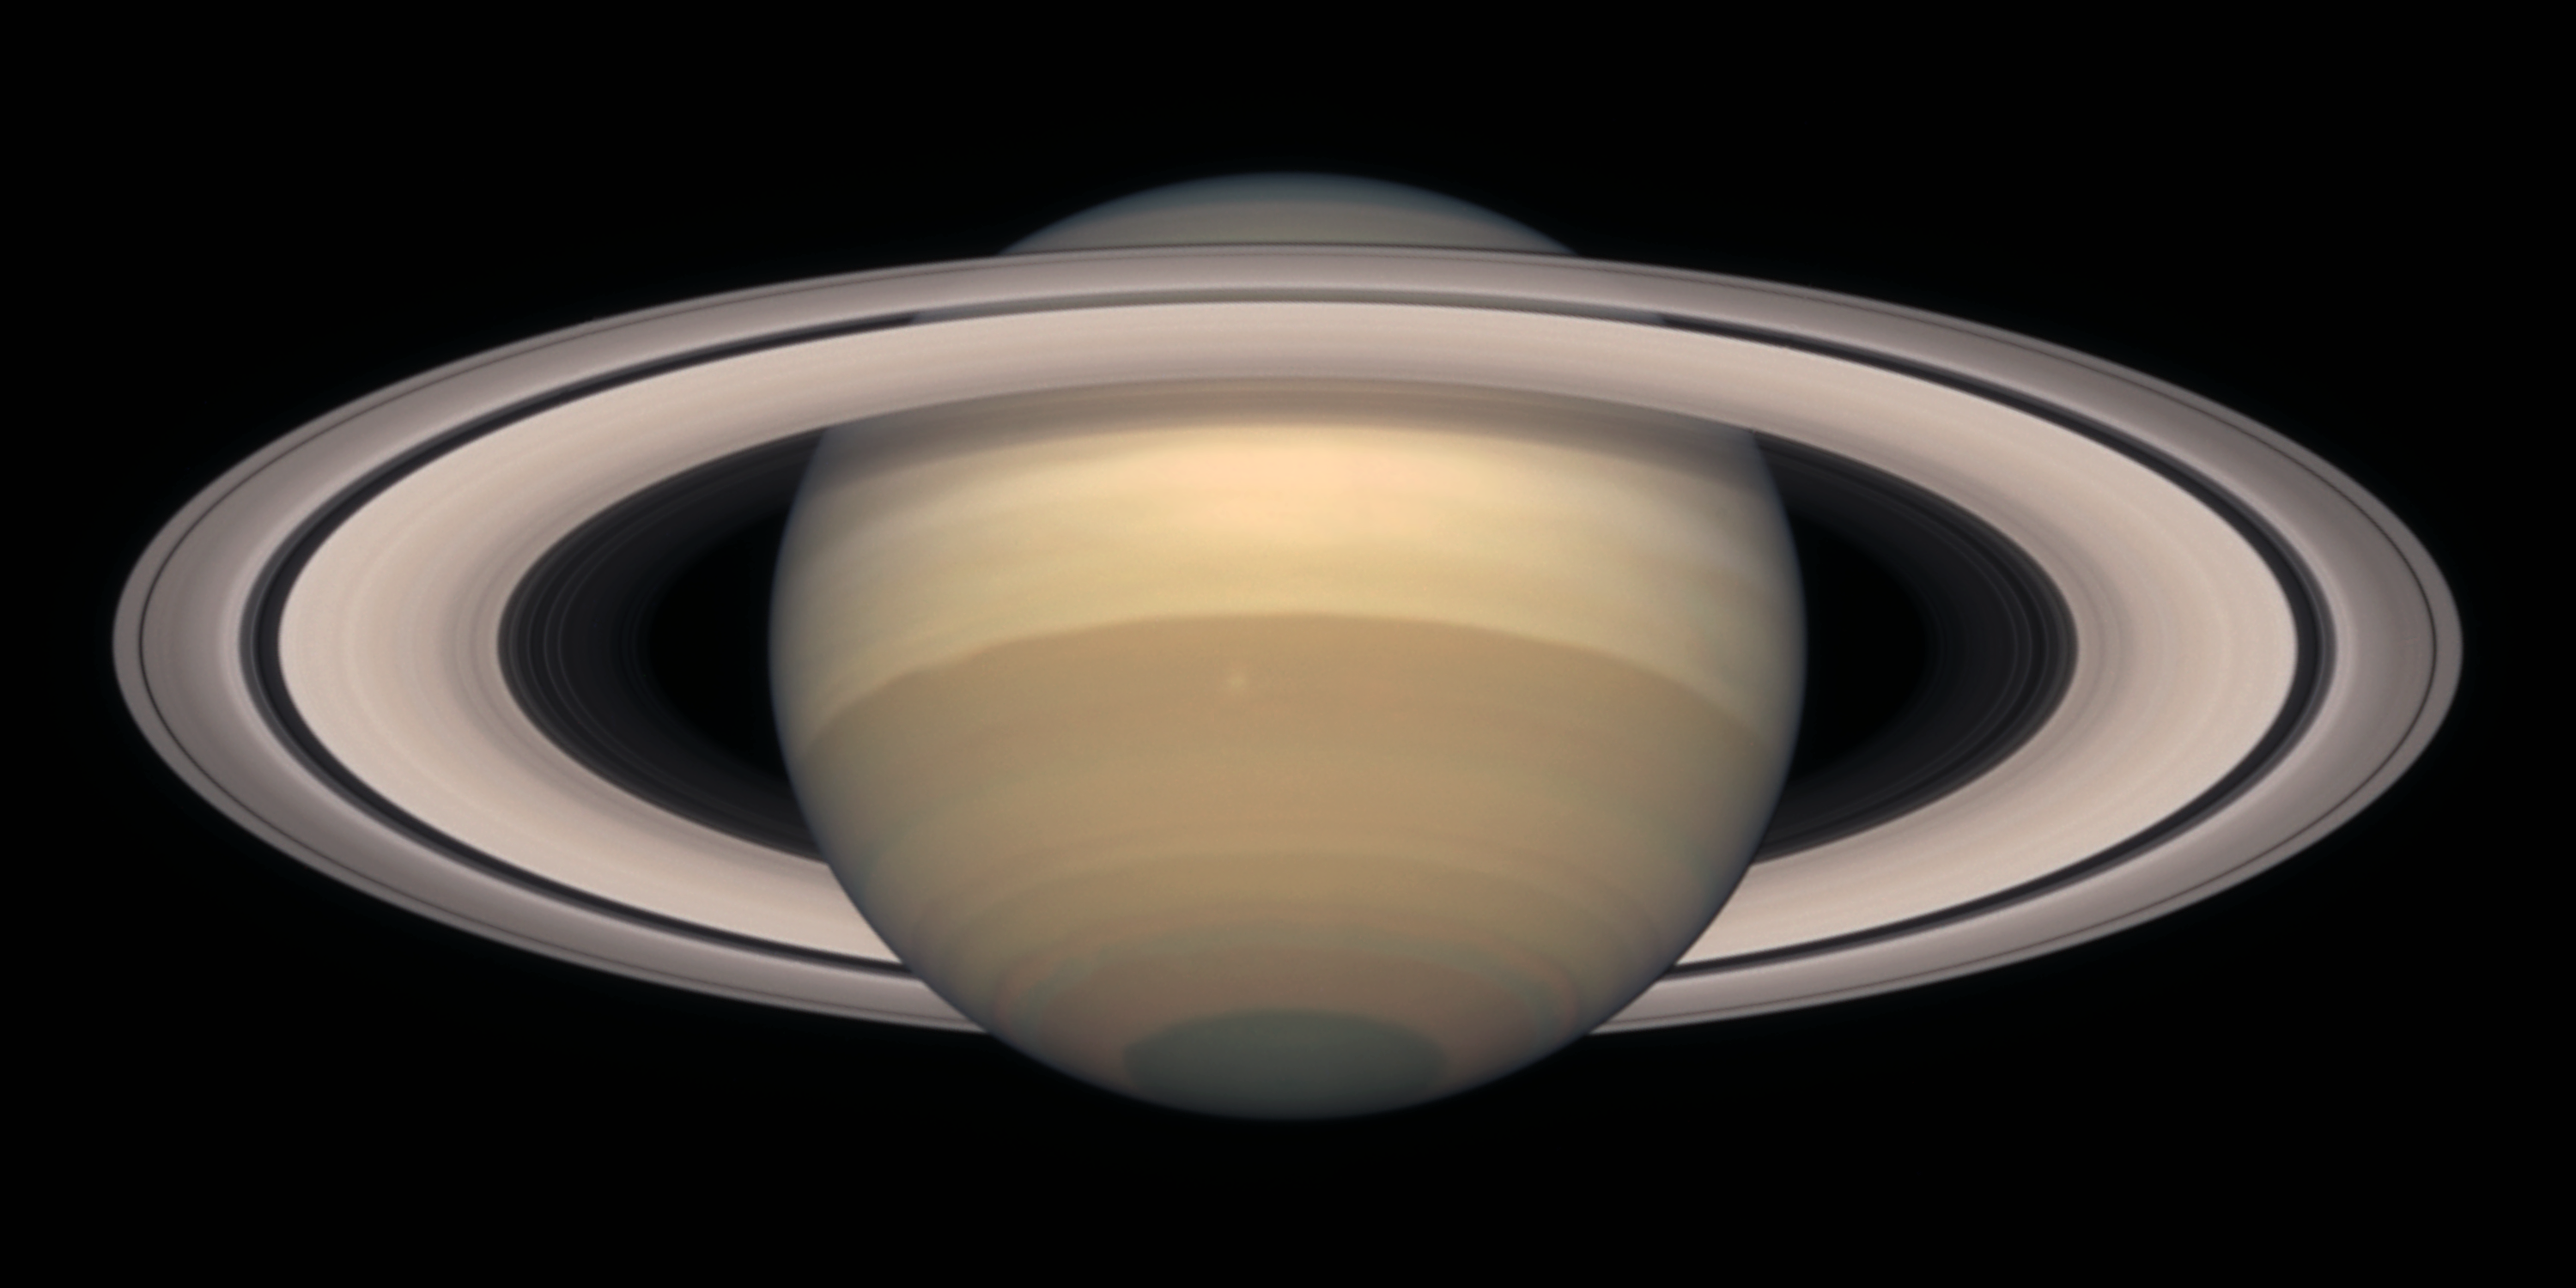

Saturn on November 1999

Saturn is about 75, 000 miles (120, 000 km) across, and is flattened at the poles because of its very rapid rotation. A day is only 10 hours long on Saturn. Strong winds account for the horizontal bands in the atmosphere of this giant gas planet.

The delicate colour variations in the clouds are due to smog in the upper atmosphere, produced when ultraviolet radiation from the Sun shines on methane gas. Deeper in the atmosphere, the visible clouds and gases merge gradually into hotter and denser gases, with no solid surface for visiting spacecraft to land on.

Credit: NASA/ESA and The Hubble Heritage Team STScI/AURA)